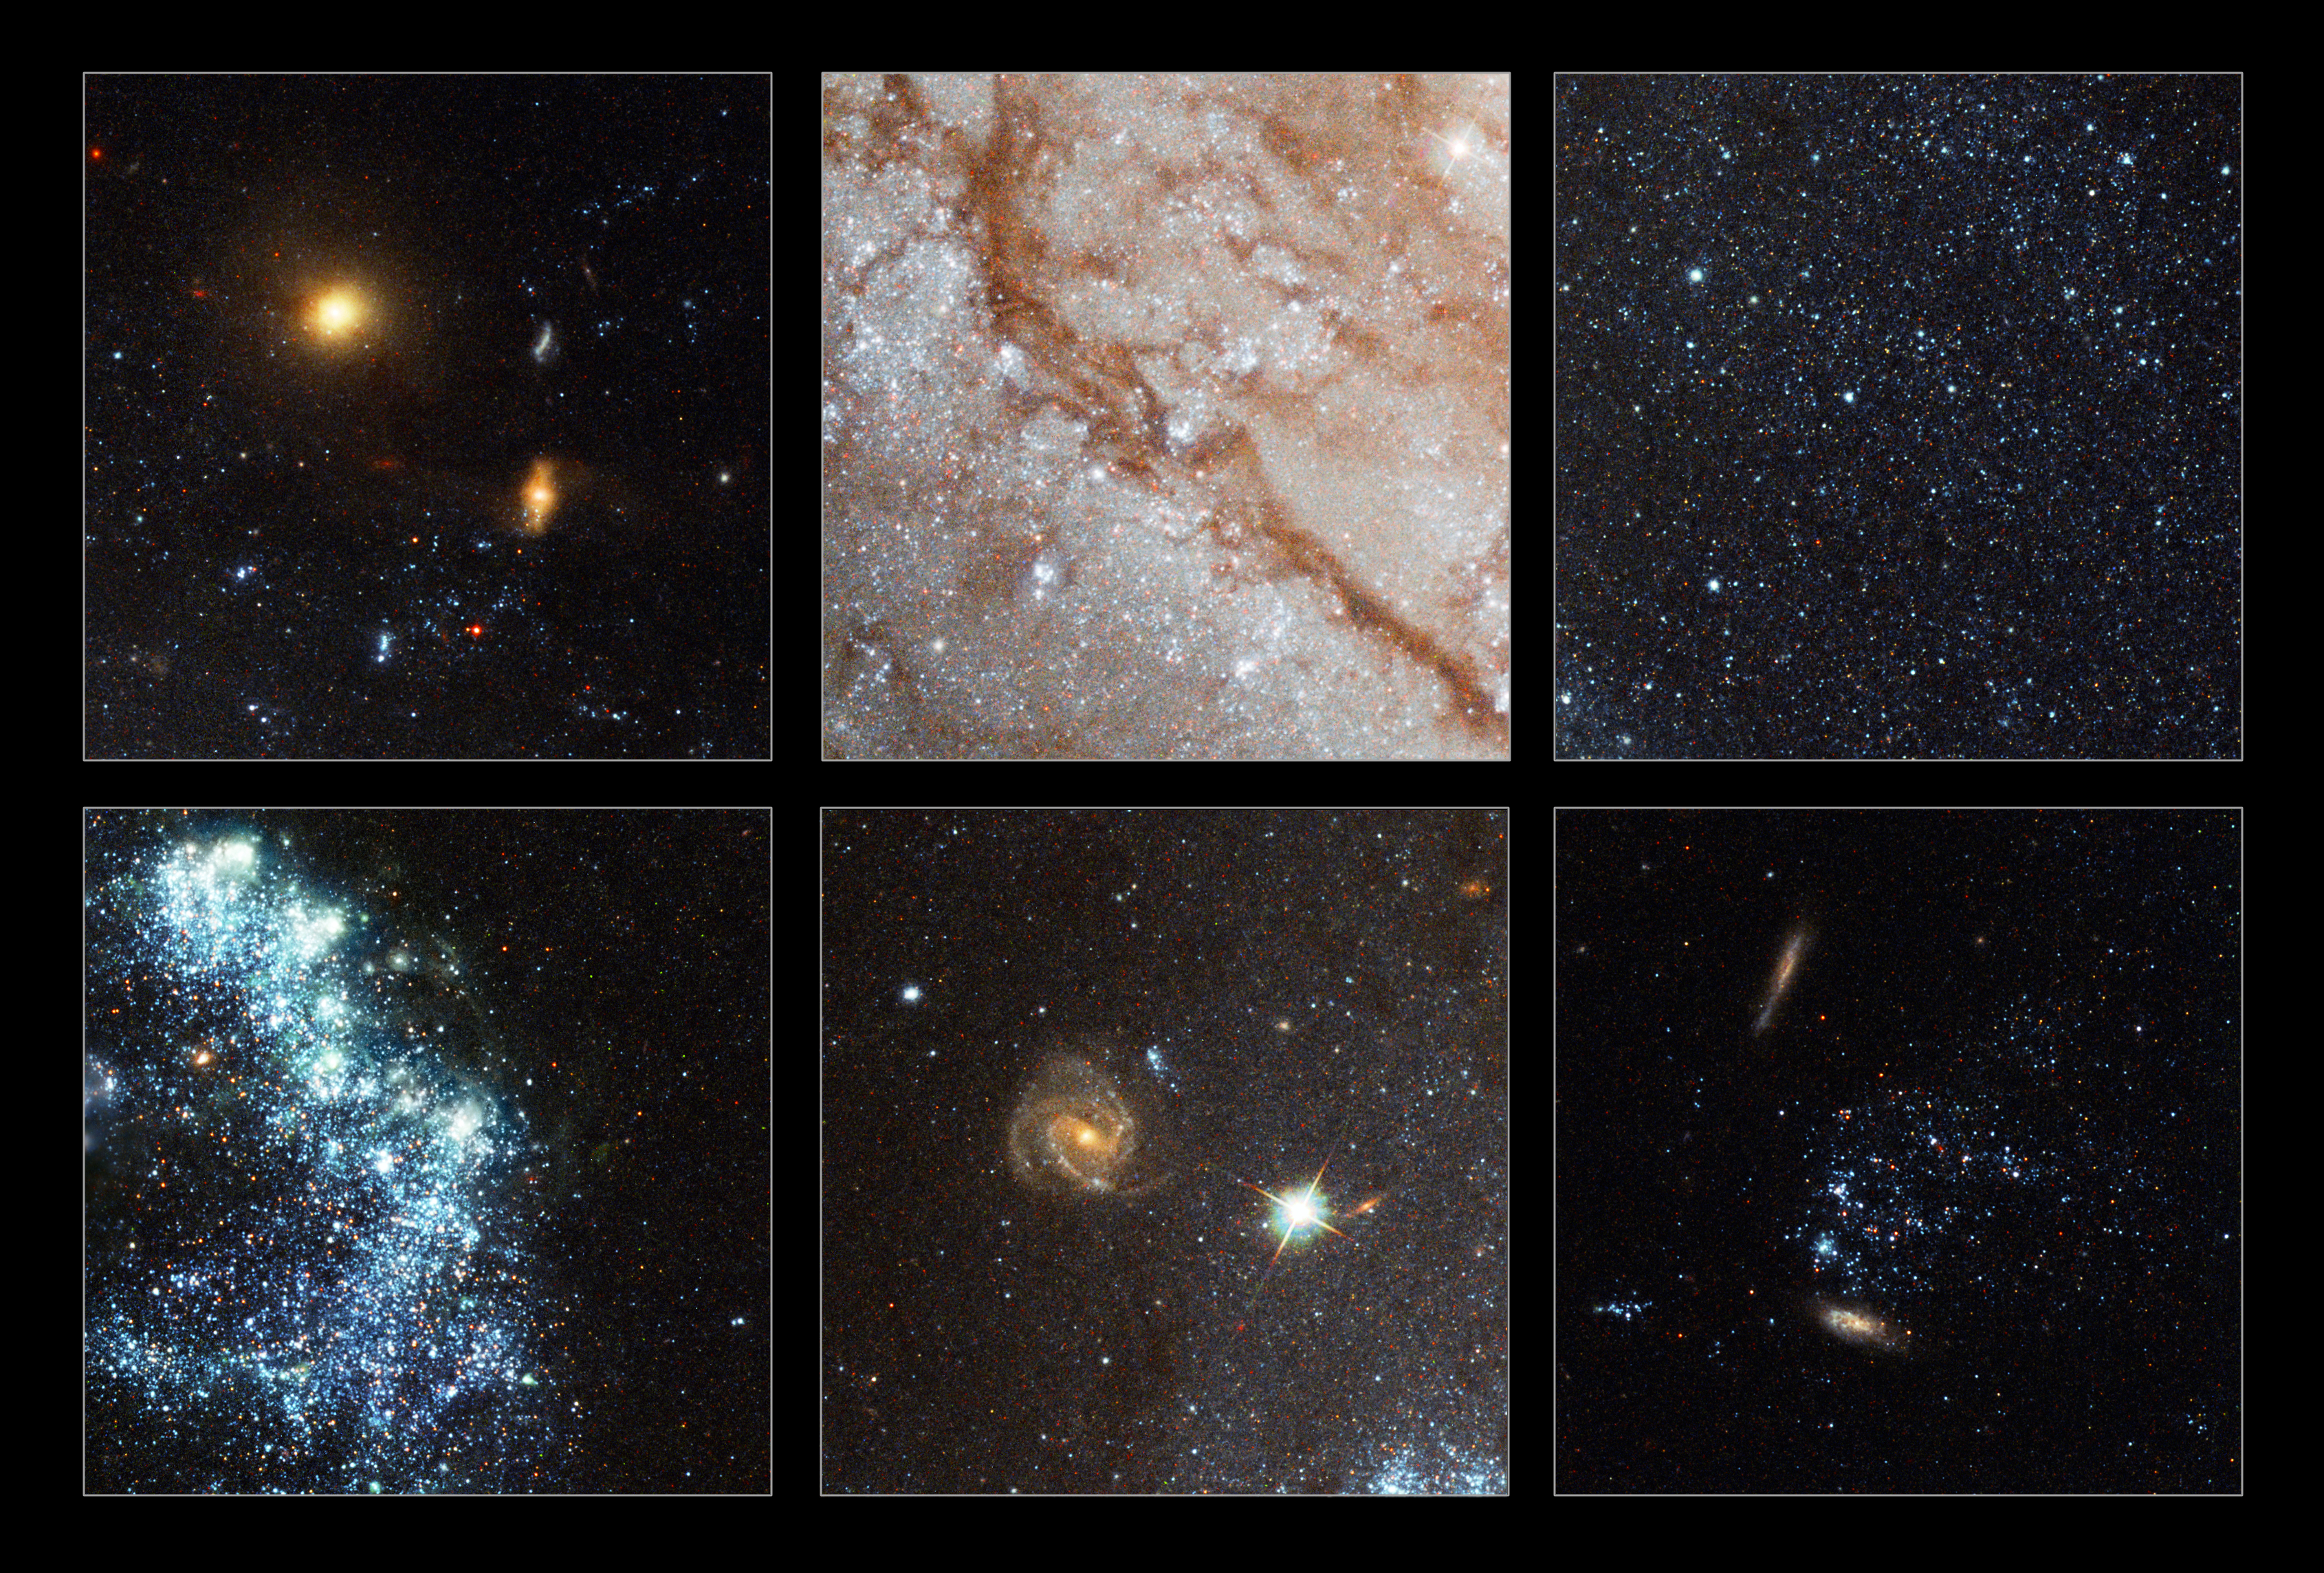

Pinwheel Galaxy close-ups

This composite shows six selected areas from the new Hubble image of Messier 101, the Pinwheel Galaxy. The close-ups show:

Upper left

Background galaxies far behind the Pinwheel Galaxy. The galaxies are clearly "reddened" by the dust in the Pinwheel.

Upper middle

Dust lanes in the Pinwheel galaxy. The dust particles scatter blue light the most and therefore colour the light from background stars red. The same effect is seen in sunsets on the Earth.

Upper right

A selection of some of the millions of individual stars visible in Messier 101 with Hubble's sharp vision. In total it is estimated that the Pinwheel galaxy contains about one trillion stars.

Lower left

An example of some of the 3000 bright clusters of sizzling newborn blue stars in the Pinwheel galaxy.

Lower middle

Another "grand design" spiral lies behind the Pinwheel Galaxy itself and is visible through its disk. Hubble's incredible resolution makes it possible to make out star forming regions in this distant galaxy.

Lower right

Two distant galaxies behind Messier 101 and a collection of individual foreground stars from one of its spiral arms.

Credit: Image: European Space Agency & NASA
Acknowledgements:
Project Investigators for the original Hubble data: K.D. Kuntz (GSFC), F. Bresolin (University of Hawaii), J. Trauger (JPL), J. Mould (NOAO), and Y.-H. Chu (University of Illinois, Urbana)
Image processing: Davide De Martin (ESA/Hubble)
CFHT image: Canada-France-Hawaii Telescope/J.-C. Cuillandre/Coelum
NOAO image: George Jacoby, Bruce Bohannan, Mark Hanna/NOAO/AURA/NSF